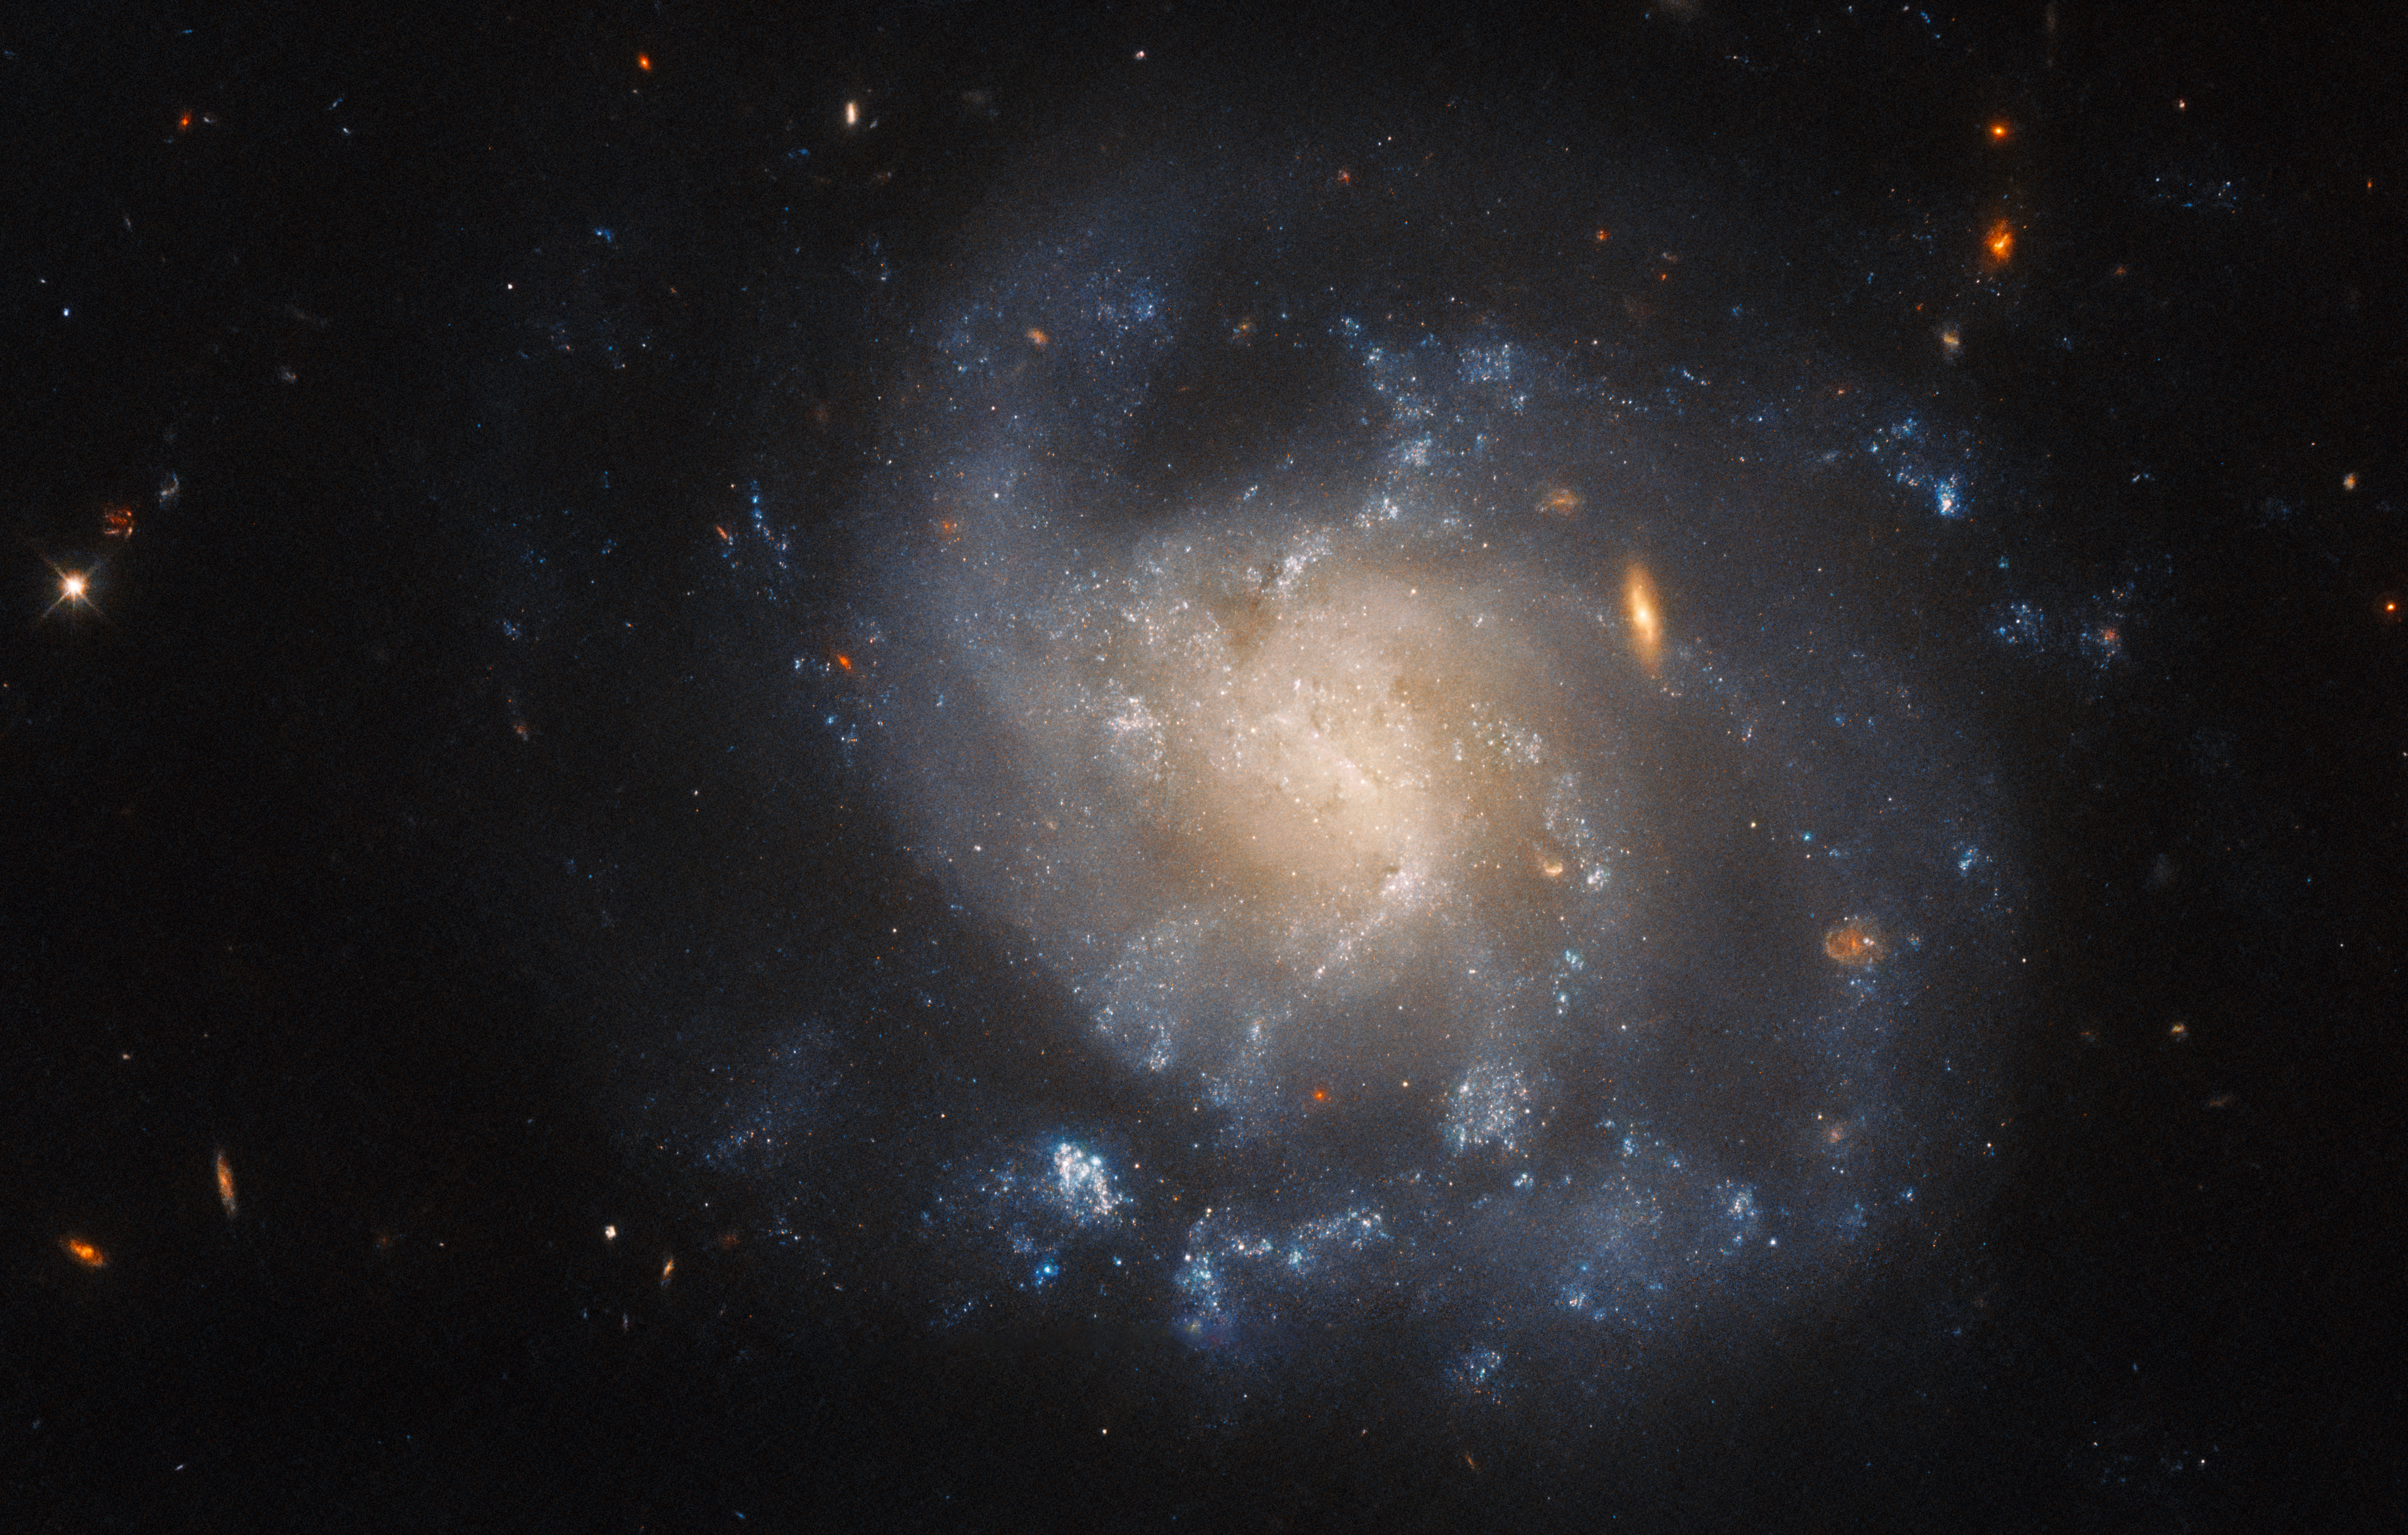

Galactic isolation

The swirls of the galaxy IC 1776 stand in splendid isolation in this image from the NASA/ESA Hubble Space Telescope. This galaxy lies over 150 million light-years from Earth in the constellation Pisces.

IC 1776 recently played host to a catastrophically violent explosion — a supernova — which was discovered in 2015 by the Lick Observatory Supernova Search, a robotic telescope which scours the night sky in search of transient phenomena such as supernovae. A network of automatic robotic telescopes are spread across the globe, operated by both professional and amateur astronomers, and, without human intervention, reveal short-lived astronomical phenomena such as wandering asteroids, gravitational microlensing, or supernovae.

Hubble investigated the aftermath of the supernova SN 2015ap during two different observing programmes, both designed to comb through the debris left by supernovae explosions in order to better understand these energetic events. A variety of telescopes automatically follow up the detection of supernovae to obtain early measurements of these events’ brightnesses and spectra. Complementing these measurements with later observations which reveal the lingering energy of supernovae can shed light on the systems which gave rise to these cosmic cataclysms in the first place.

Credit: ESA/Hubble & NASA, A. Filippenko